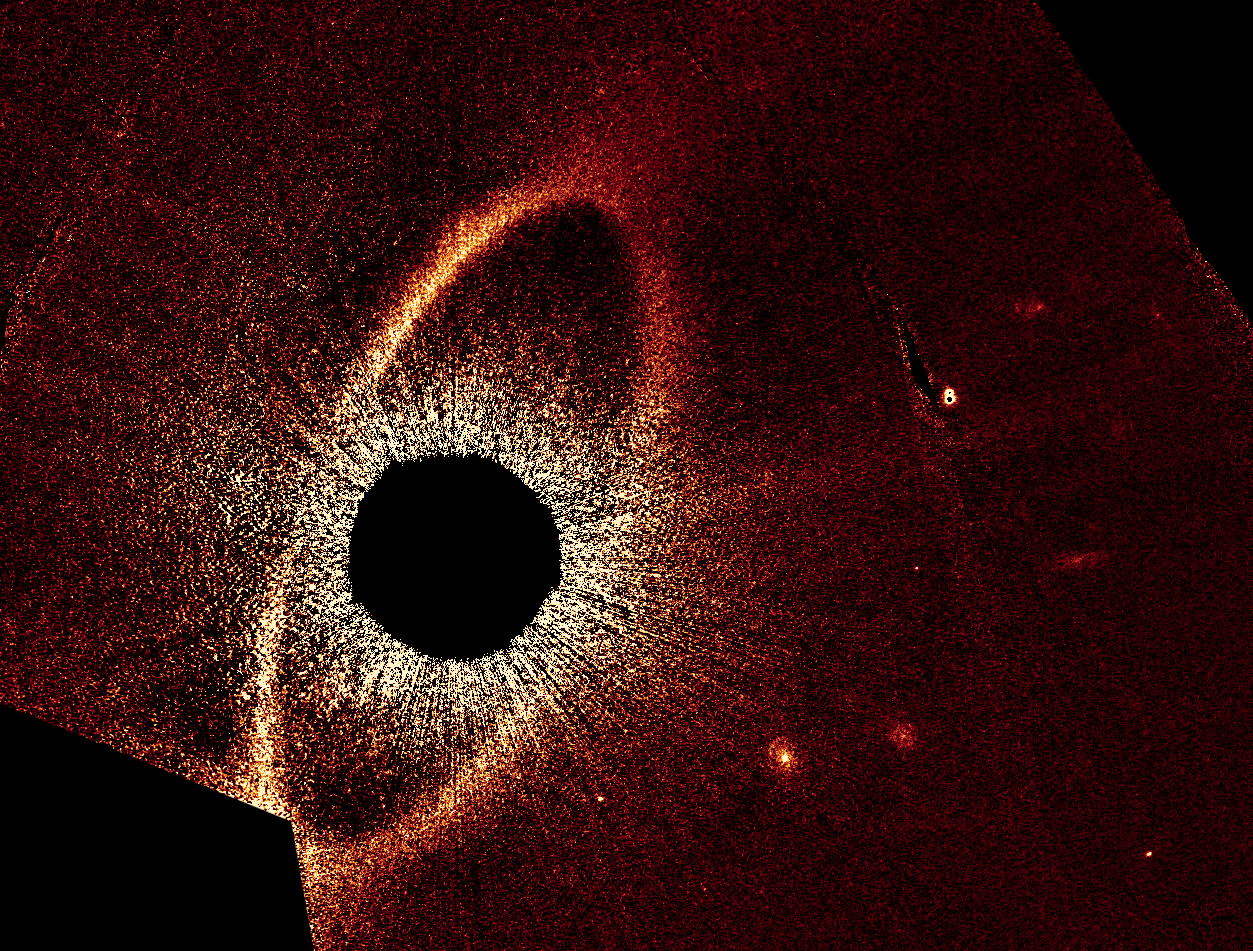

Fomalhaut system

Fomalhaut system.

Credit: NASA, ESA and P. Kalas (University of California, Berkeley, USA)